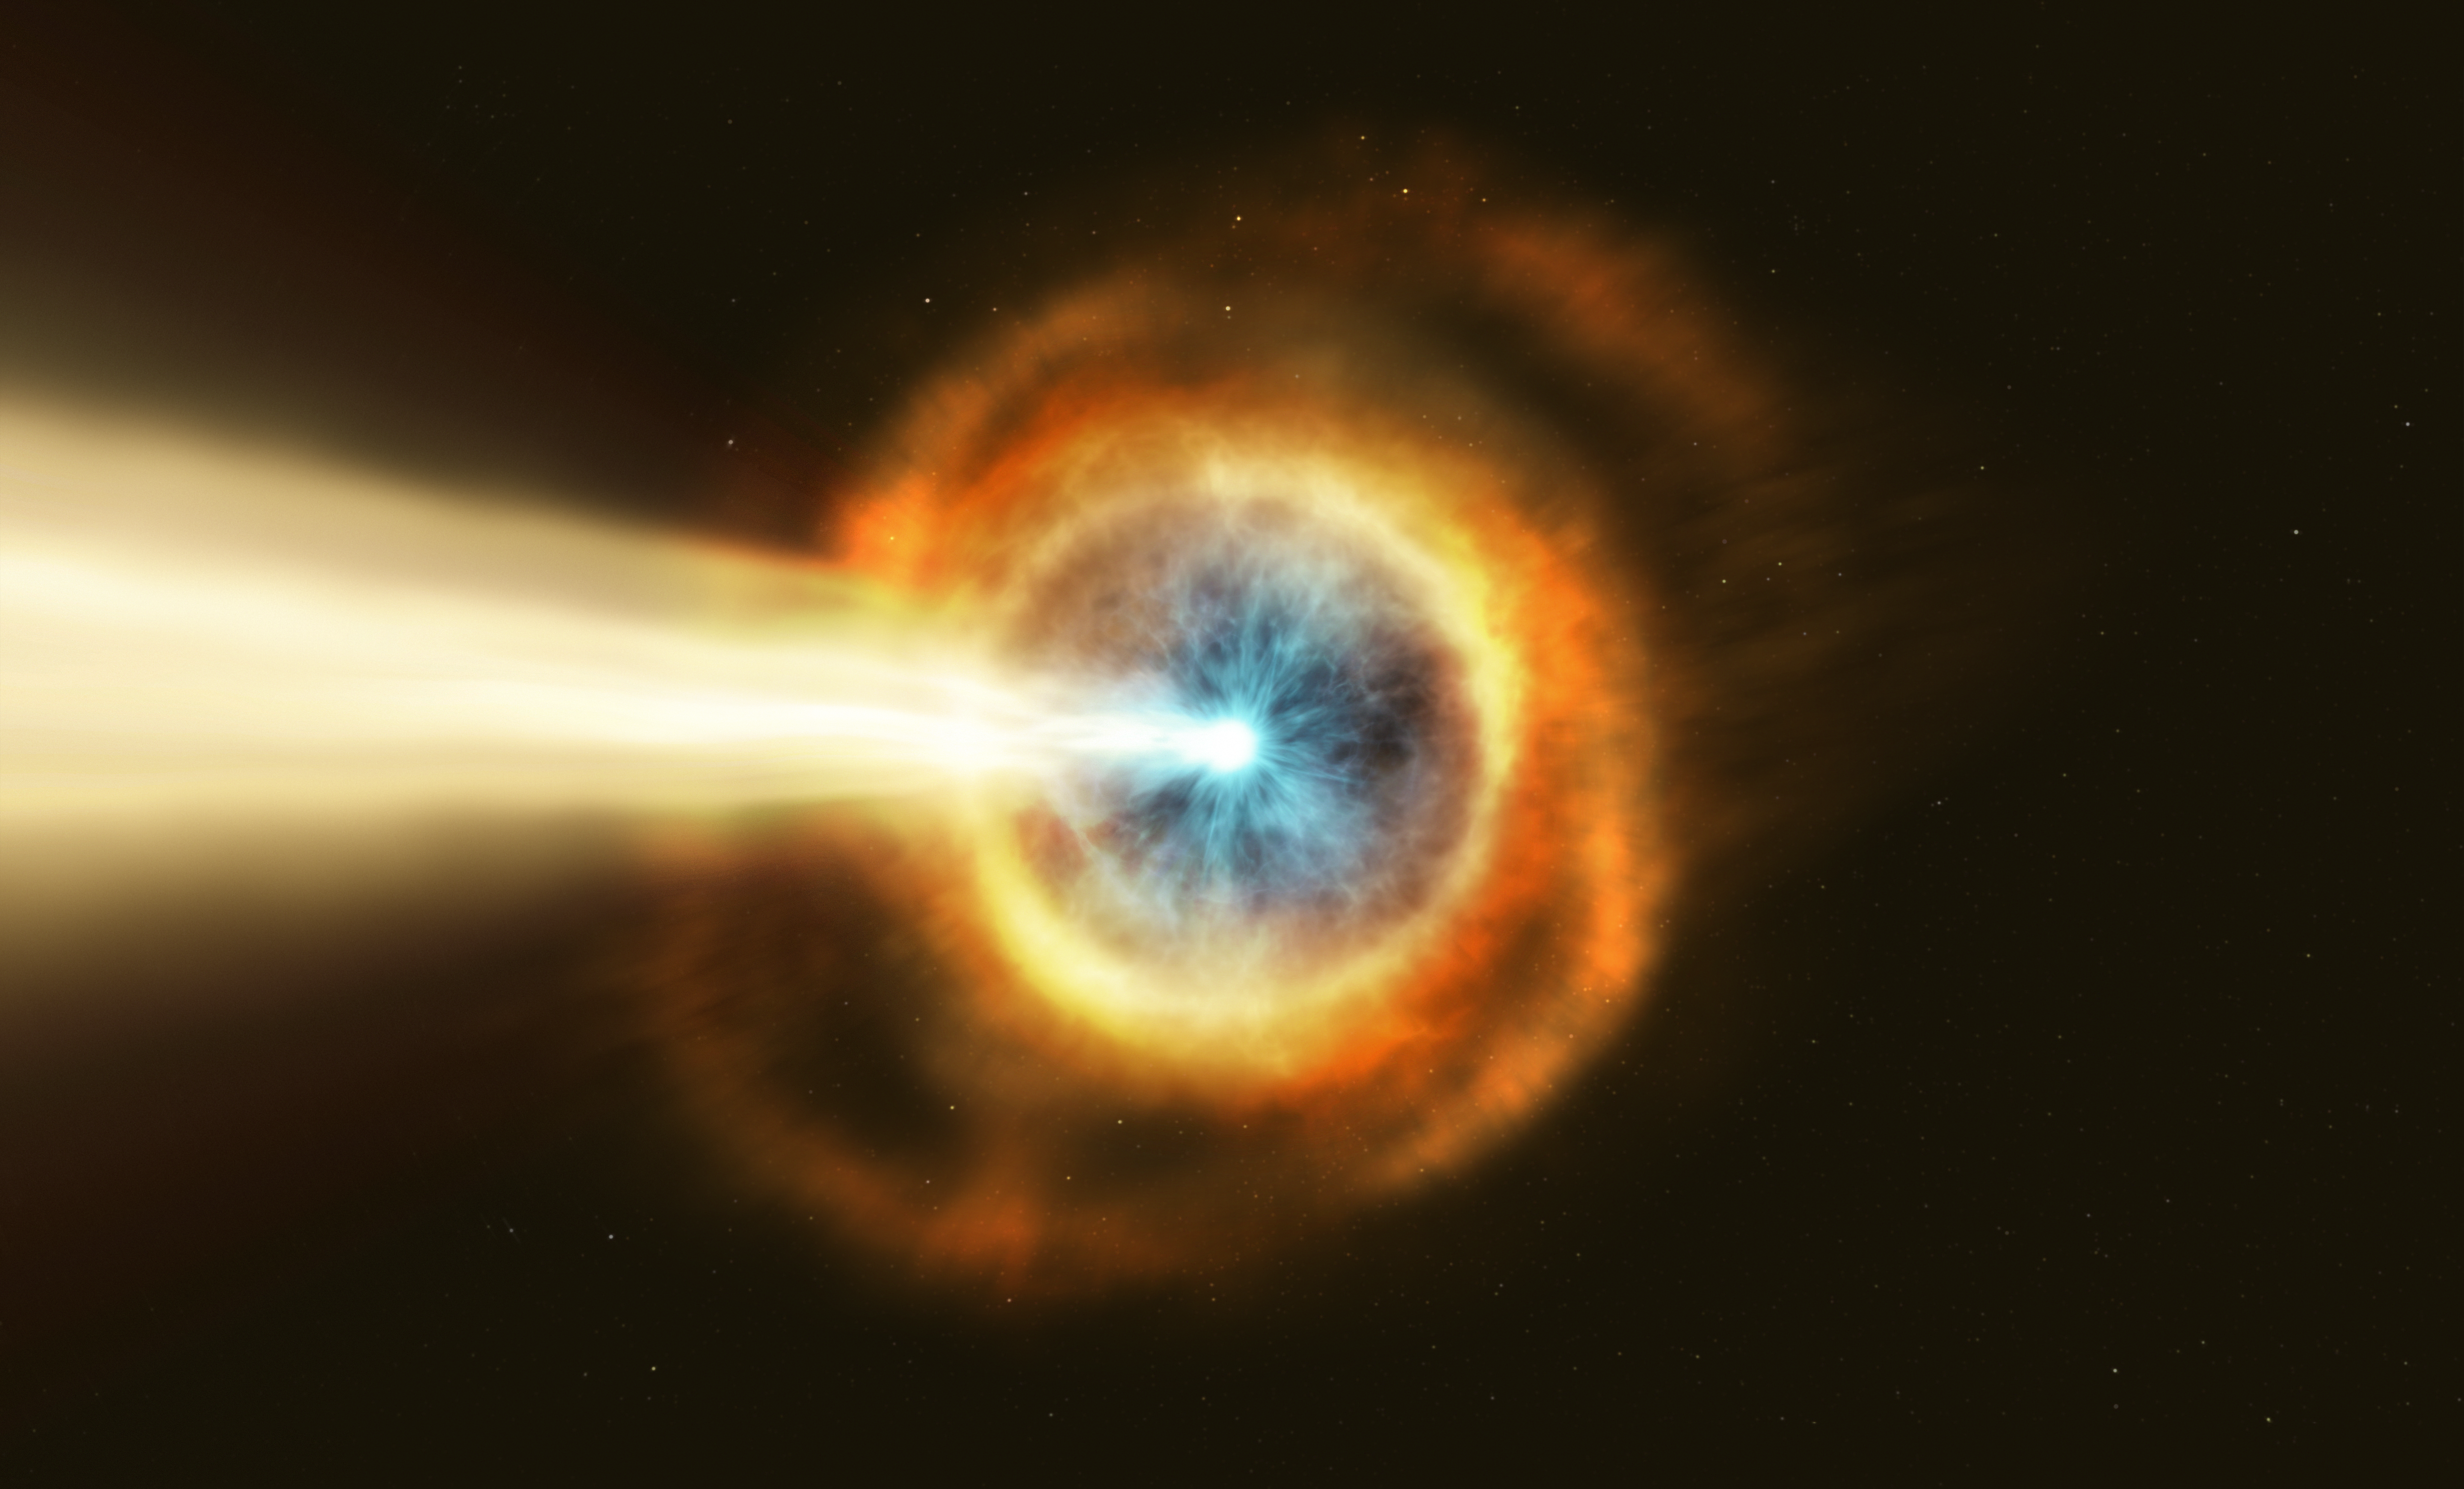

GRB 190114C (Artist’s Impression)

New observations from the NASA/ESA Hubble Space Telescope have investigated the nature of the powerful gamma-ray burst GRB 190114C by studying its environment.

Gamma-ray bursts are the most powerful explosions in the Universe. They emit most of their energy in gamma rays, light which is much more energetic than the visible light we can see with our eyes.

Hubble’s observations suggest that this particular burst displayed such powerful emission because the collapsing star was sitting in a very dense environment, right in the middle of a bright galaxy 5 billion light years away.

Credit: ESA/Hubble, M. Kornmesser